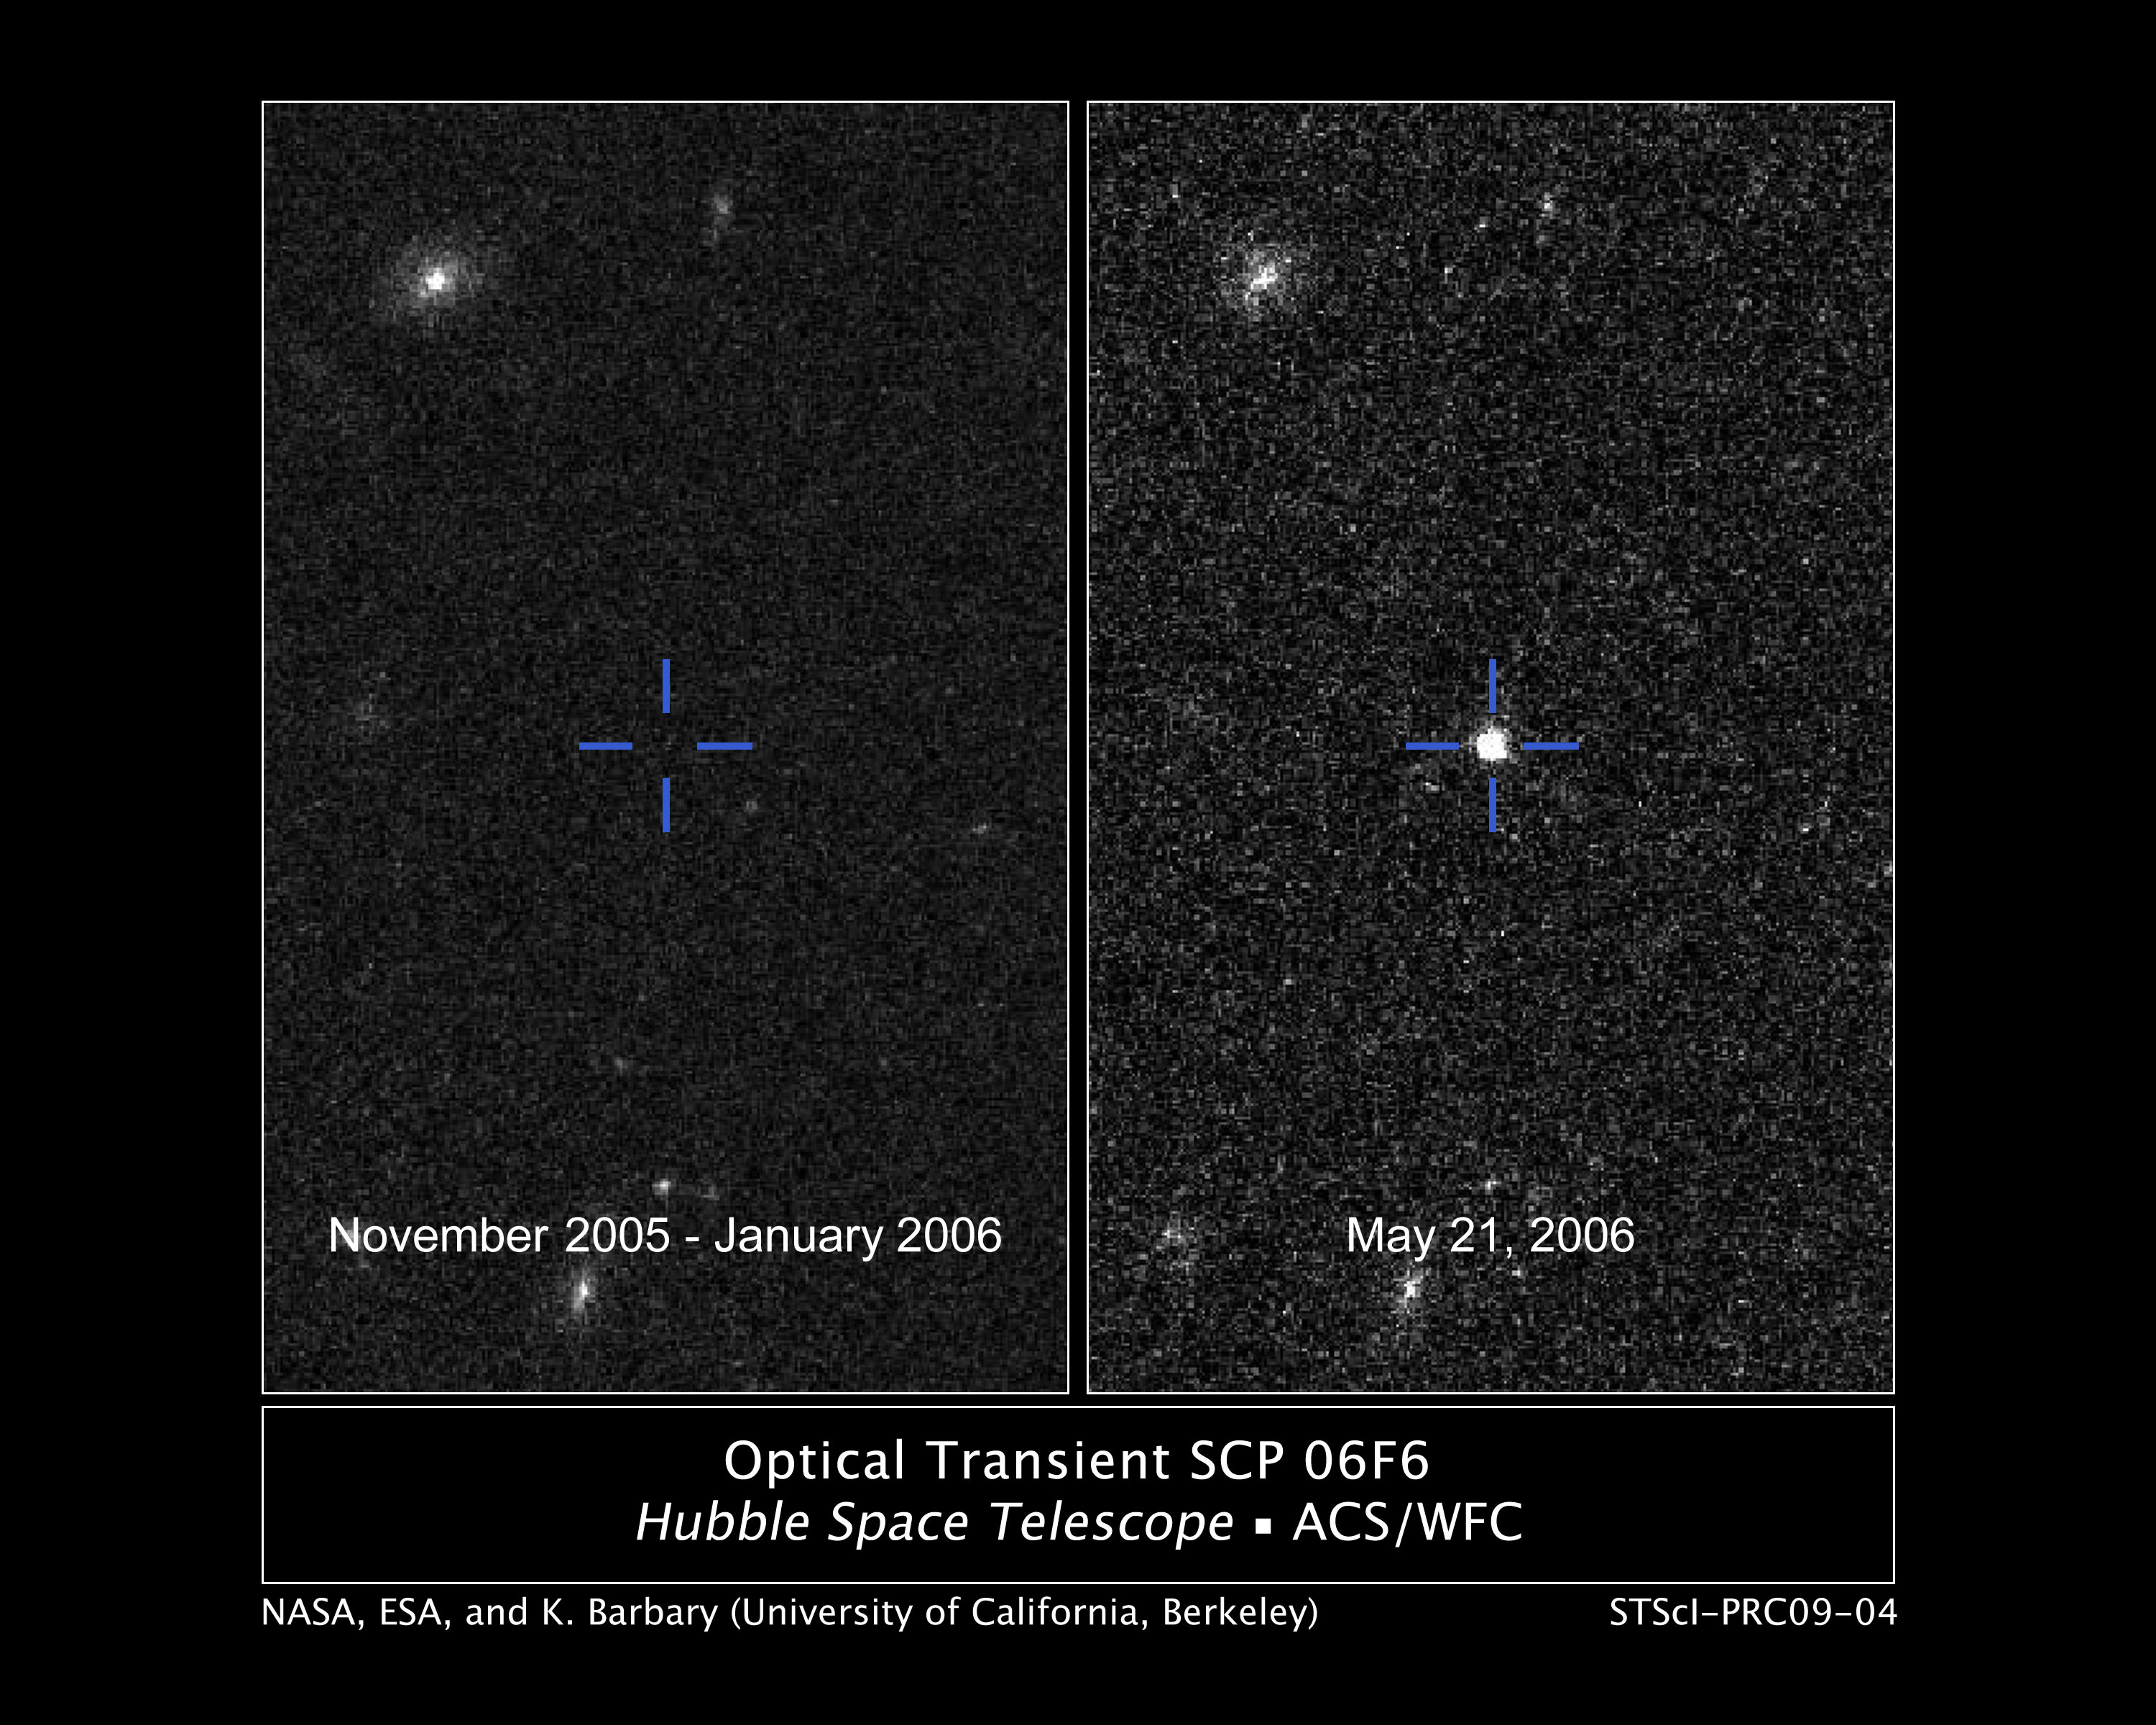

Optical Transient SCP 06F6

This pair of NASA/ESA Hubble Space Telescope pictures shows the appearance of a mysterious burst of light that was detected on 21 February 2006, brightened over 100 days, and then faded into oblivion after another 100 days. The source of the outburst remains unidentified.

The event was detected serendipitously in a Hubble search for supernovae in a distant cluster of galaxies. The light-signature of this event does not match the behavior of a supernova or any previously observed astronomical transient phenomenon in the universe.

Credit: NASA, ESA and K. Barbary (University of California, Berkeley)